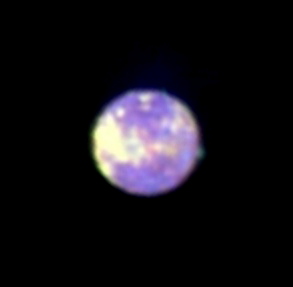

Jupiter's Volcanic Moon Io

In this picture of Io, the mound rising from Io's surface is actually an eruption from Pillan, a volcano that had previously been dormant.

Measurements at two ultraviolet wavelengths indicate that the ejecta consist of sulfur dioxide 'snow, ' making the plume appear green in this false-color image. Astronomers increased the colour contrast and added false colours to the image to make the faint plume visible.

Credit: J. Spencer (Lowell Observatory) and NASA/ESA